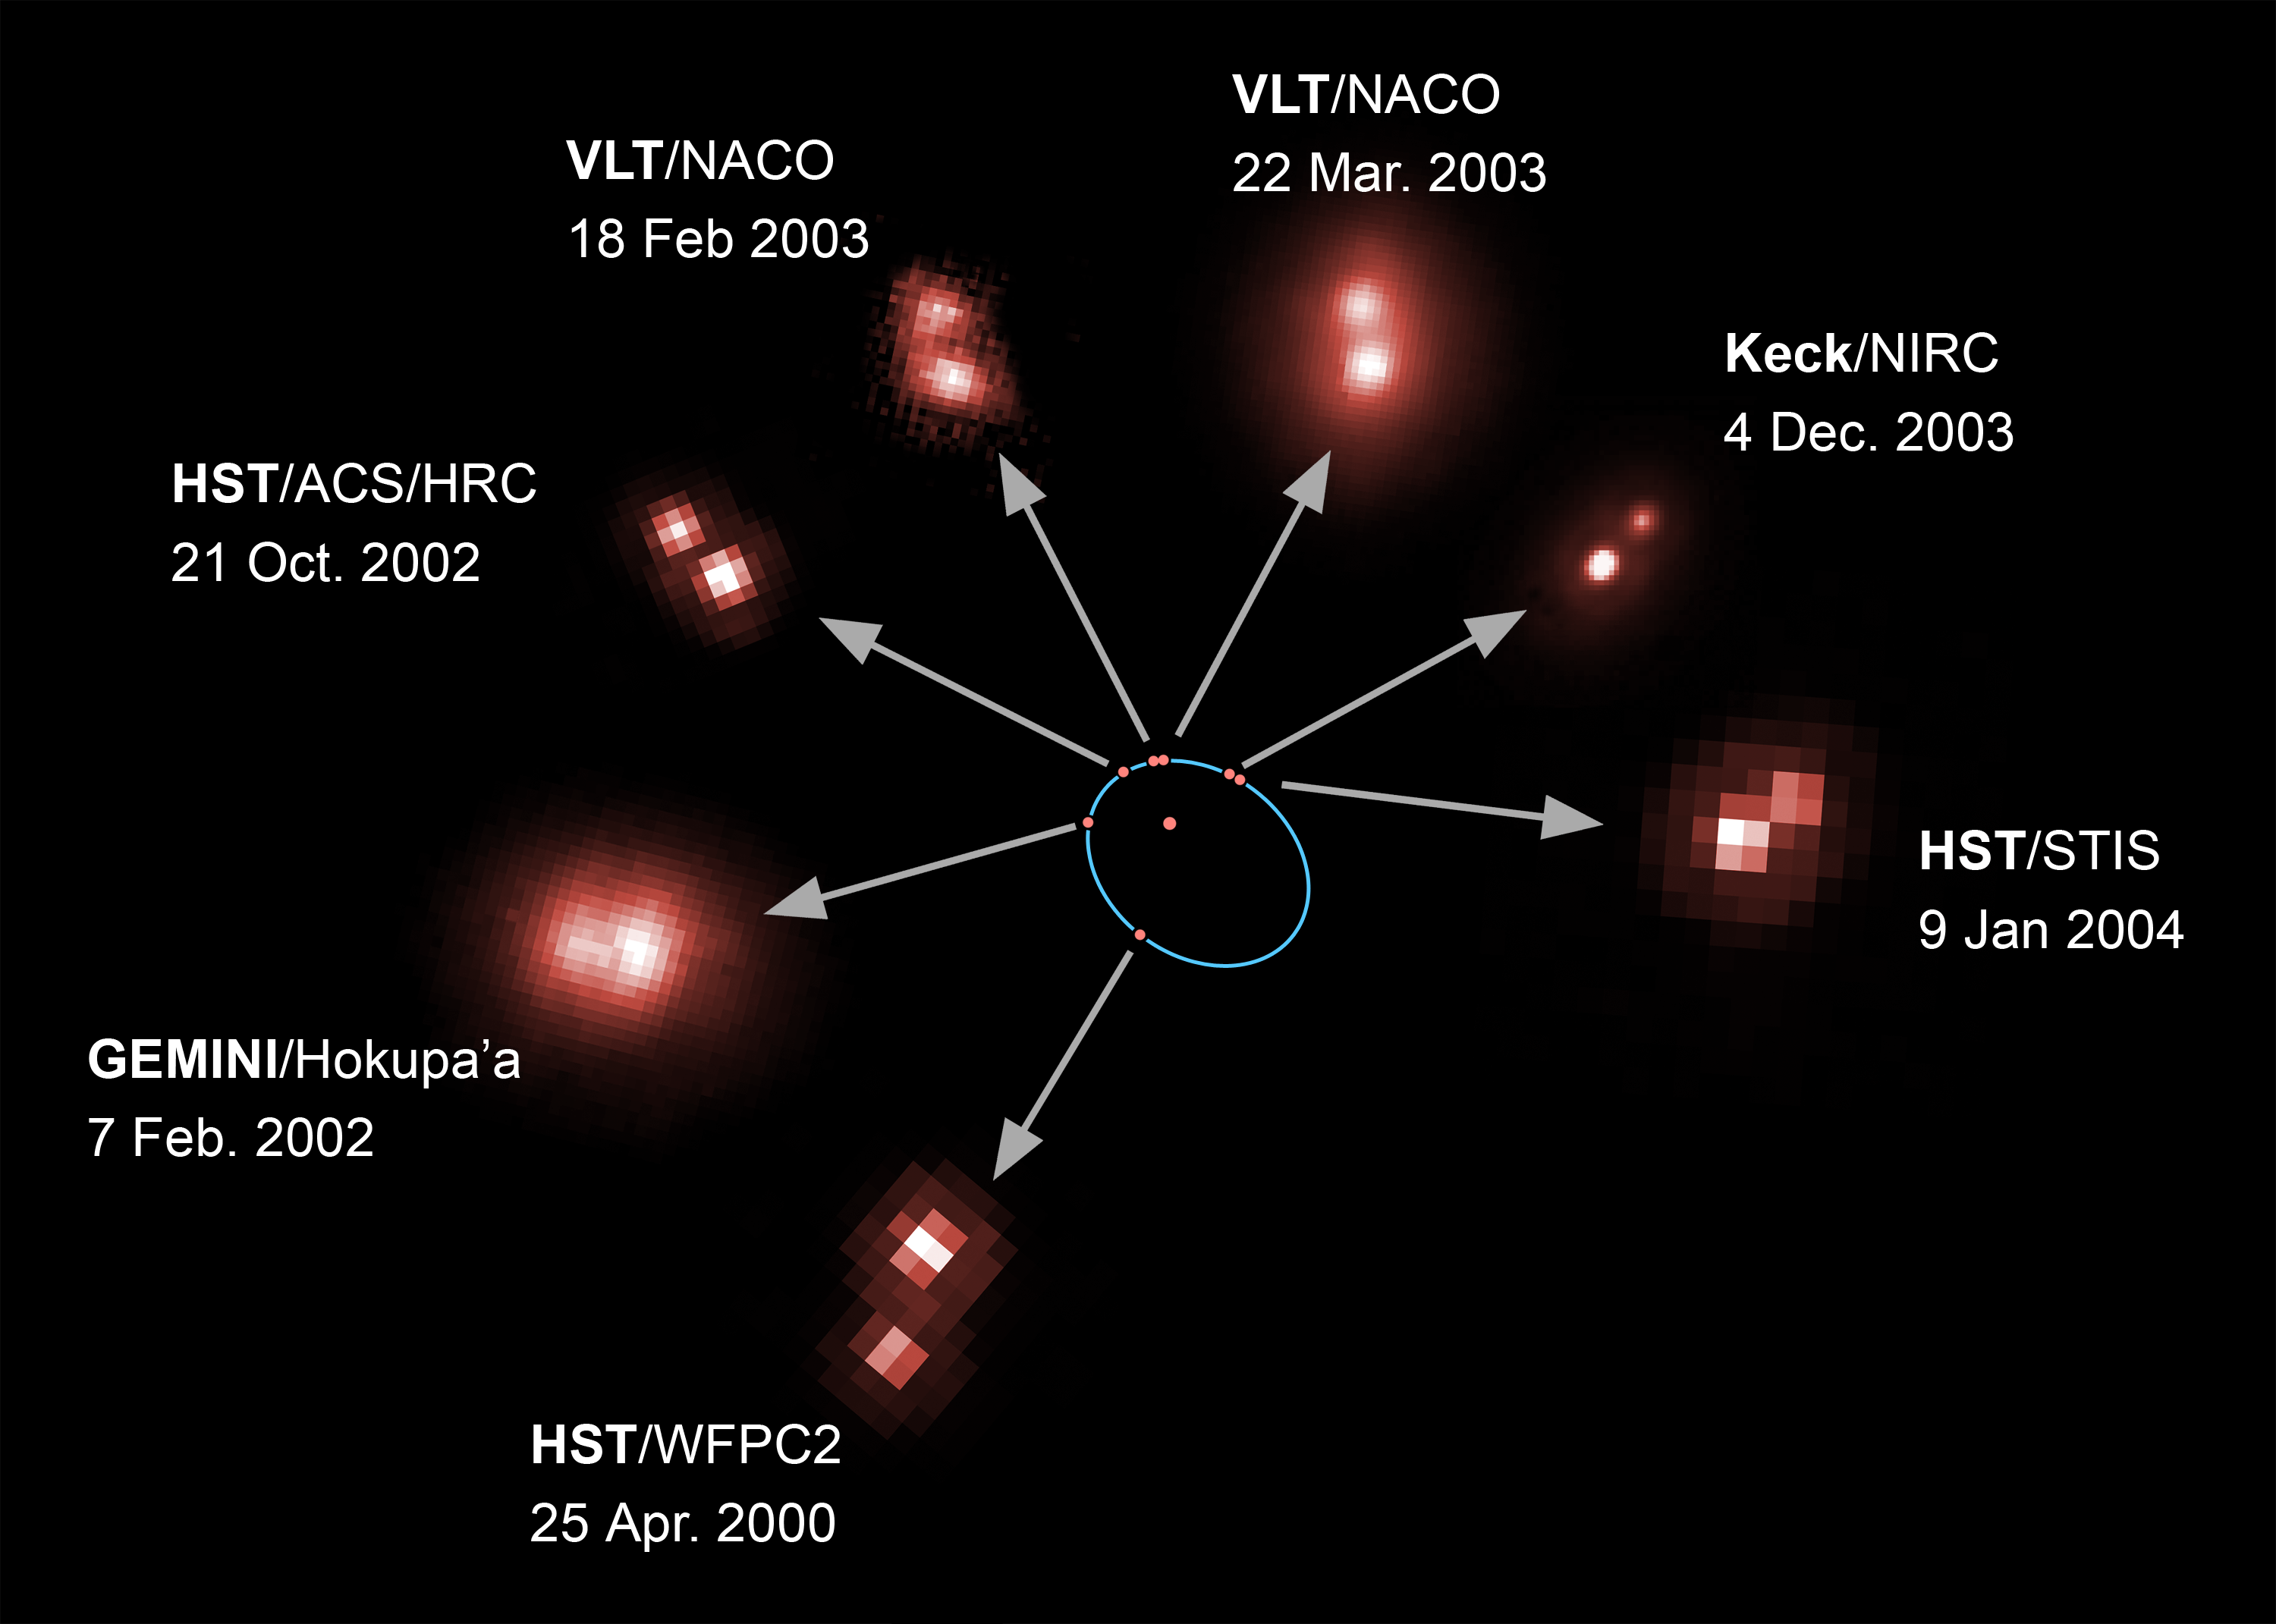

Orbit of ultra-cool brown dwarf binary

An international team of astronomers using the world's biggest telescopes have directly measured the mass of an ultra-cool brown dwarf star and its companion star for the first time. Barely the size of the planet Jupiter, the dwarf star weighs in at just 8.5 percent of the mass of our Sun. This is the first ever mass measurement of a dwarf star belonging to a new stellar class of very low mass ultra-cool dwarf stars called L-dwarfs. The observation is a major step towards our understanding of the types of objects that occupy the gap between the lightest stars and the heaviest planets.

This image shows the orbit of the brown dwarf around the ultra-cool L-dwarf. Each red dot on the orbit (in blue) corresponds to one observation made with a ground- or space-based telescope. The observations cover 60% of the whole orbit.

Credit: ESA/NASA and Herve Bouy (Max-Planck-Institut für Extraterrestrische Physik/ESO, Germany)